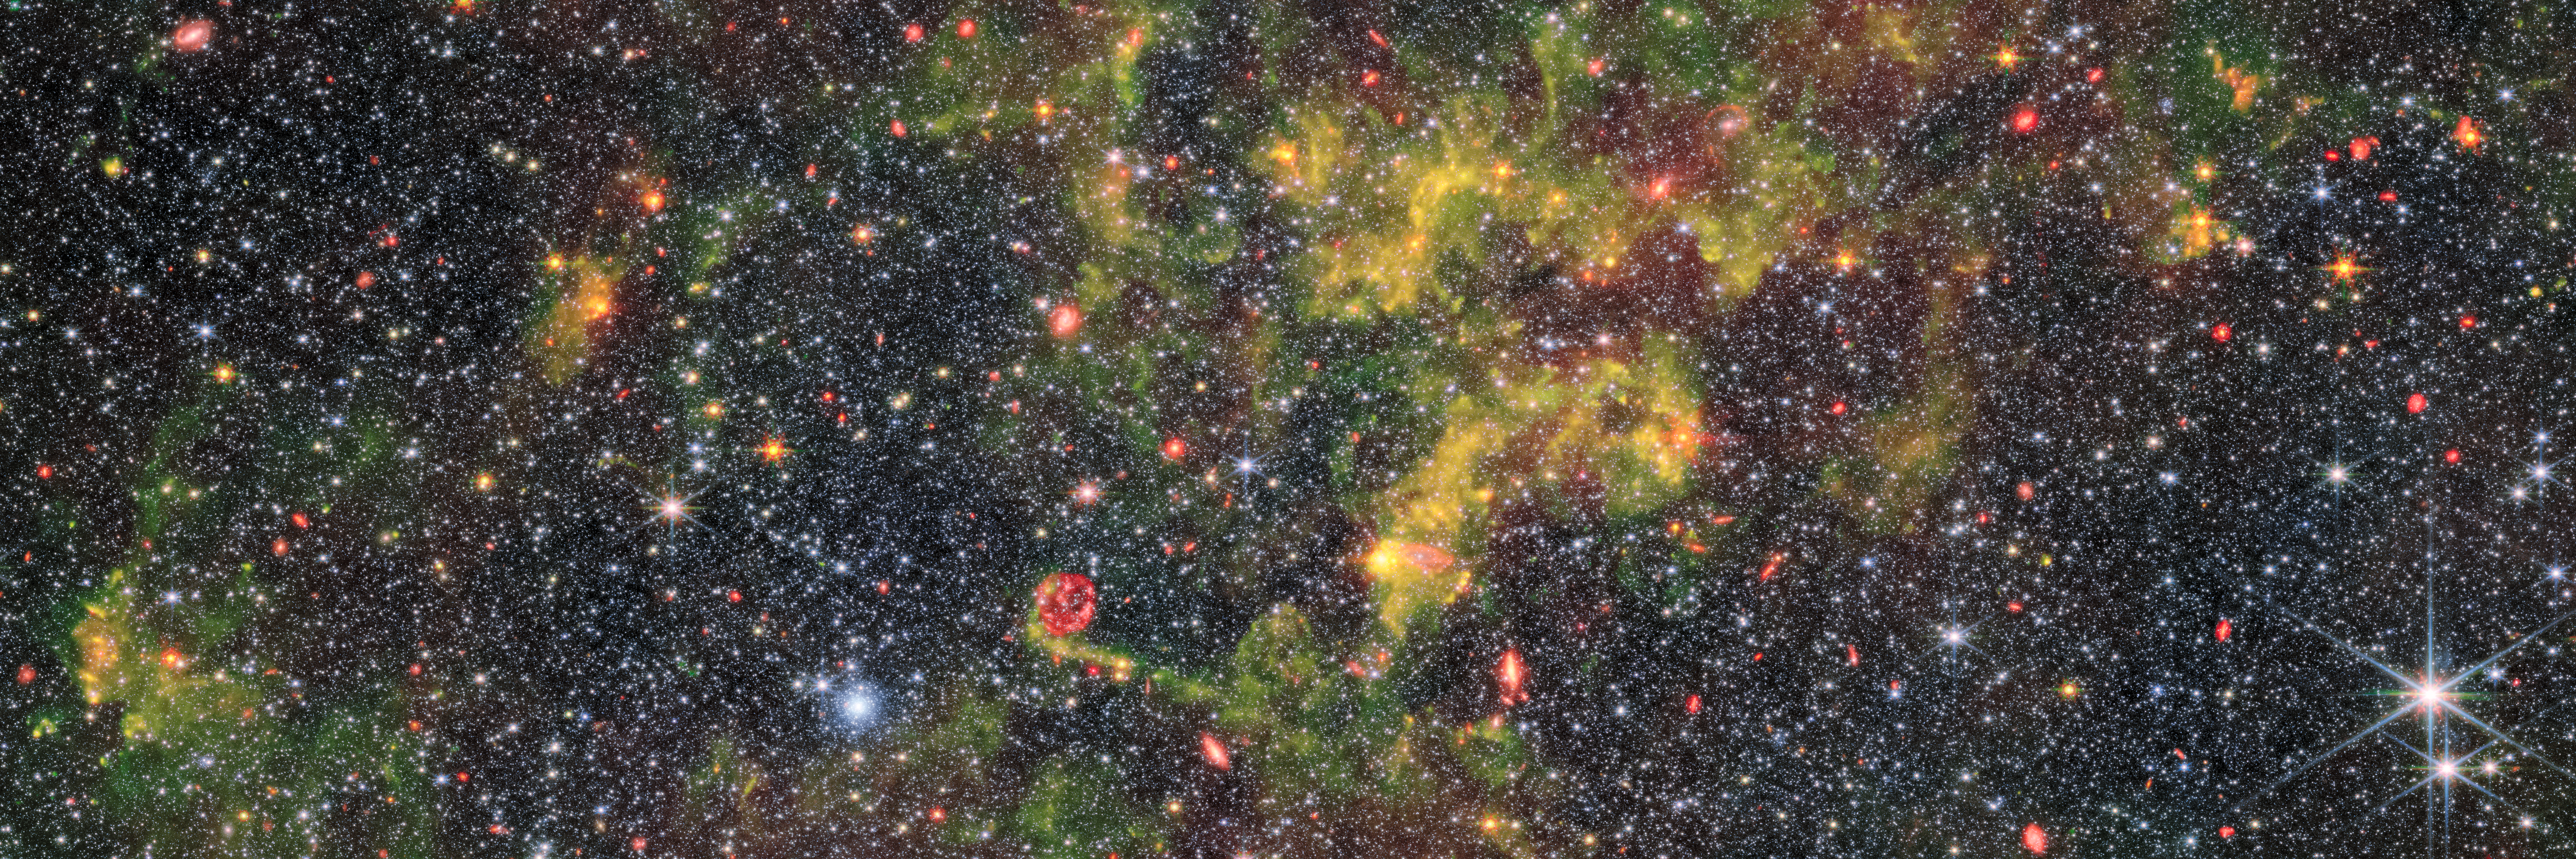

The life and times of dust

This image shows the irregular galaxy NGC 6822, which was observed by the Near-InfraRed Camera (NIRCam) and Mid-InfraRed Instrument (MIRI) mounted on the NASA/ESA/CSA James Webb Space Telescope. As their names suggest, NIRCam and MIRI probe different parts of the electromagnetic spectrum. This allows the instruments to observe different components of the same galaxy, with MIRI especially sensitive to its gas-rich regions (the yellow swirls in this image) and NIRCam suitable for observing its densely packed field of stars.

NGC 6822 lies about 1.5 million light-years away, and is the Milky Way’s nearest galactic neighbour that is not one of its satellites. It has a low metallicity, meaning that it contains low proportions of elements that are not hydrogen and helium. Metallicity is an absolutely key concept in astronomy, in part because elements other than hydrogen and helium are largely produced by stars over their lifetimes. Therefore, in the very early Universe (before the first generation of stars had been born, lived and died) everything had very low metallicity. This makes contemporary low-metallicity objects (like NGC 6822) objects of interest for understanding how processes such as the evolution of stars and the life cycle of interstellar dust likely occurred in the early Universe. This was the motivation for these observations of NGC 6822 with Webb: to better understand how stars form and how dust evolves in low-metallicity environments.

The study of NGC 6822 has an interesting history that long predates modern investigations with Webb. It was first discovered by E. E. Barnard, who presented his discovery in a very brief paper in 1884 in The Sidereal Messenger: a short-lived but important American monthly astronomical journal that was published between 1882 and 1891. As with many astronomical objects that appeared diffuse with telescopes of the time, NGC 6822 was miscategorised as an “exceedingly faint nebula”.

Over the next few years, a series of confusions arose around NGC 6822 over its apparent size, brightness, and even what kind of object it was, because astronomers at the time did not properly account for how different the same object might look with different telescopes. Edwin Hubble, namesake of the NASA/ESA Hubble Space telescope, went on to study NGC 6822 in depth and published a far more detailed paper of his own in 1925. This work was exceptionally important for humanity’s evolving understanding of the Universe, because, in Hubble’s own words: “N.G.C. 6822, [was] the first object definitely assigned to a region outside the galactic system”. This paper contributed to solving the debate that was raging amongst astronomers about the extent of the Universe at the time by demonstrating that there were astronomical objects that lay beyond the Milky Way. The study of this galaxy was notably continued by Susan Kayser, who was the first woman to receive a PhD in astronomy from Caltech. Her 1966 thesis remained the most thorough investigation of this galaxy until the 2000s. Now, the study of this key local galaxy is being continued by Webb.

Credit: ESA/Webb, NASA & CSA, M. Meixner